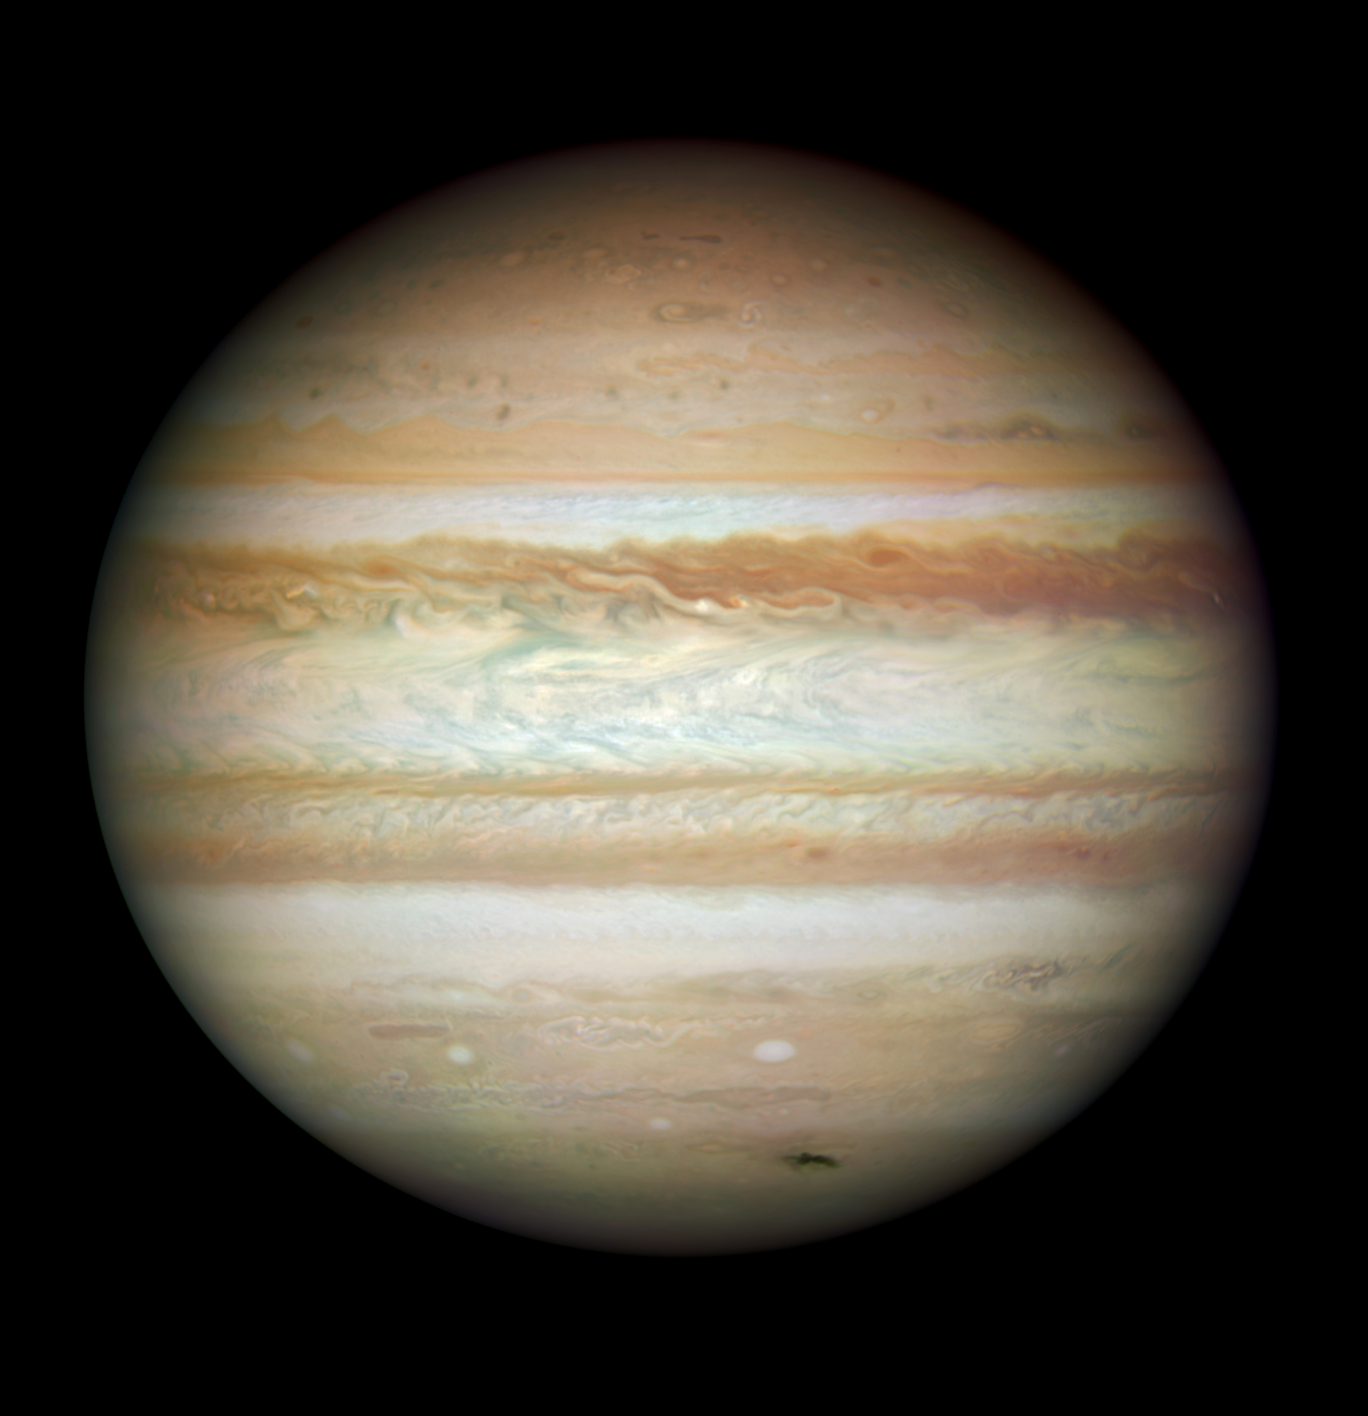

Collision leaves giant Jupiter bruised

This Hubble picture, taken on 23 July, is the first full-disc, natural-colour image of Jupiter made with Hubble's new camera, the Wide Field Camera 3 (WFC3). It is the sharpest visible-light picture of Jupiter since the New Horizons spacecraft flew by that planet in 2007. Each pixel in this high-resolution image spans about 119 kilometres in Jupiter's atmosphere. Jupiter was more than 600 million kilometres from Earth when the images were taken.

The dark smudge at bottom right is debris from a comet or asteroid that plunged into Jupiter's atmosphere and disintegrated.

In addition to the fresh impact, the image reveals a spectacular variety of shapes in the swirling atmosphere of Jupiter. The planet is wrapped in bands of yellow, brown and white clouds. These bands are produced by the atmosphere flowing in different directions at various places. When these opposing flows interact, turbulence appears.

Such data complement the images taken from other telescopes and spacecraft by providing exquisite details of atmospheric phenomena. For example, the image suggests that dark "barges" — tracked by amateur astronomers on a nightly basis — may differ both in form and colour from barge features identified by the Voyager spacecraft. (The Great Red Spot and the smaller Red Oval are both out of view on the other side of the planet.)

This colour image is a composite of three separate colour exposures (red, blue and green) made by WFC3. Additional processing was done to compensate for asynchronous imaging in the colour filters and other effects.

Credit: NASA, ESA, Michael Wong (Space Telescope Science Institute, Baltimore, MD), H. B. Hammel (Space Science Institute, Boulder, CO) and the Jupiter Impact Team